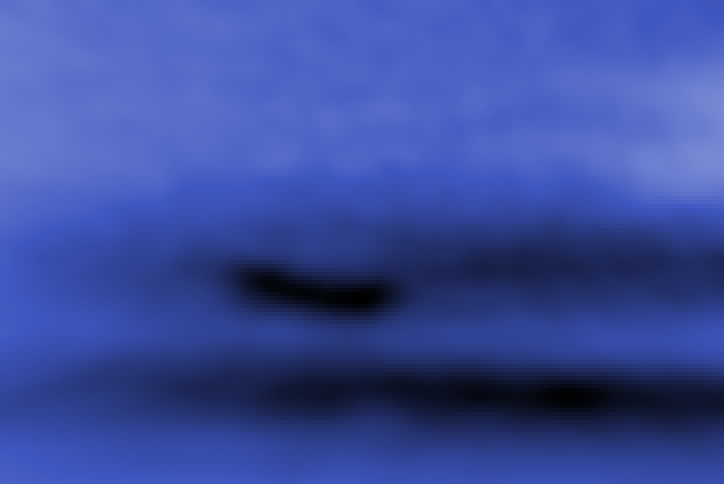

Blue Light Neptune Global Map from Hubble's OPAL Program (Dark Spot Closeup)

This new image taken with the NASA/ESA Hubble Space Telescope confirms the presence of a dark vortex in the atmosphere of Neptune. The dark spot measures roughly 4,800 kilometers across.

The image shows that the vortex is best seen at blue wavelengths. Only Hubble has the high resolution required for identifying such weather features on distant Neptune.

Credit: NASA, ESA, and M.H. Wong and J. Tollefson (UC Berkeley)